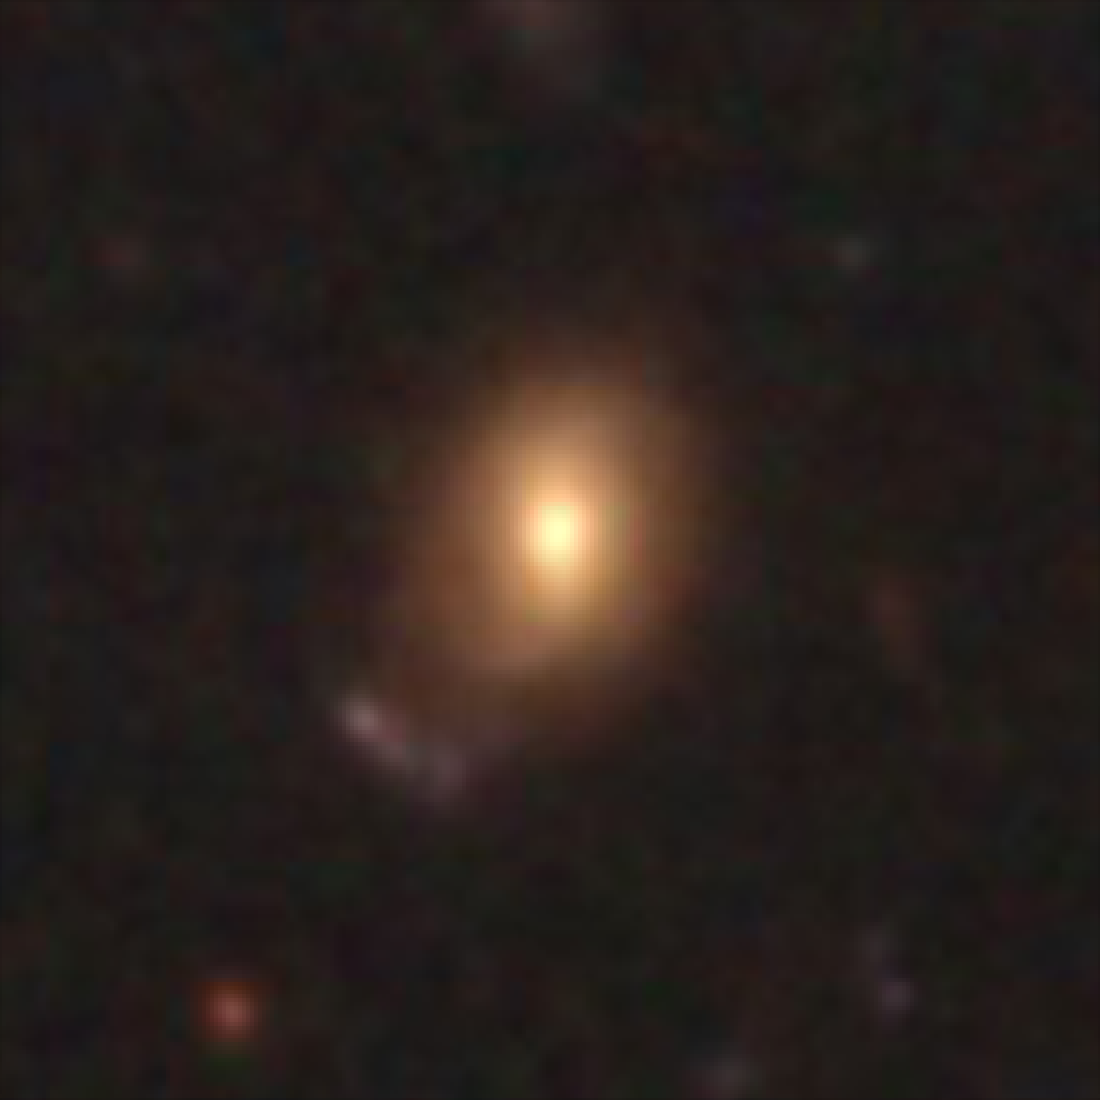

Hubble galaxy at redshift z = 0.65

This image, taken by the NASA/ESA Hubble Space Telescope, shows a galaxy similar in mass to the Milky Way. The galaxy is seen as it was 6.1 billion years ago.

Credit: NASA, ESA, C. Papovich (Texas A&M University), H. Ferguson (STScI), S. Faber (University of California, Santa Cruz), and I. Labbé (Leiden University)